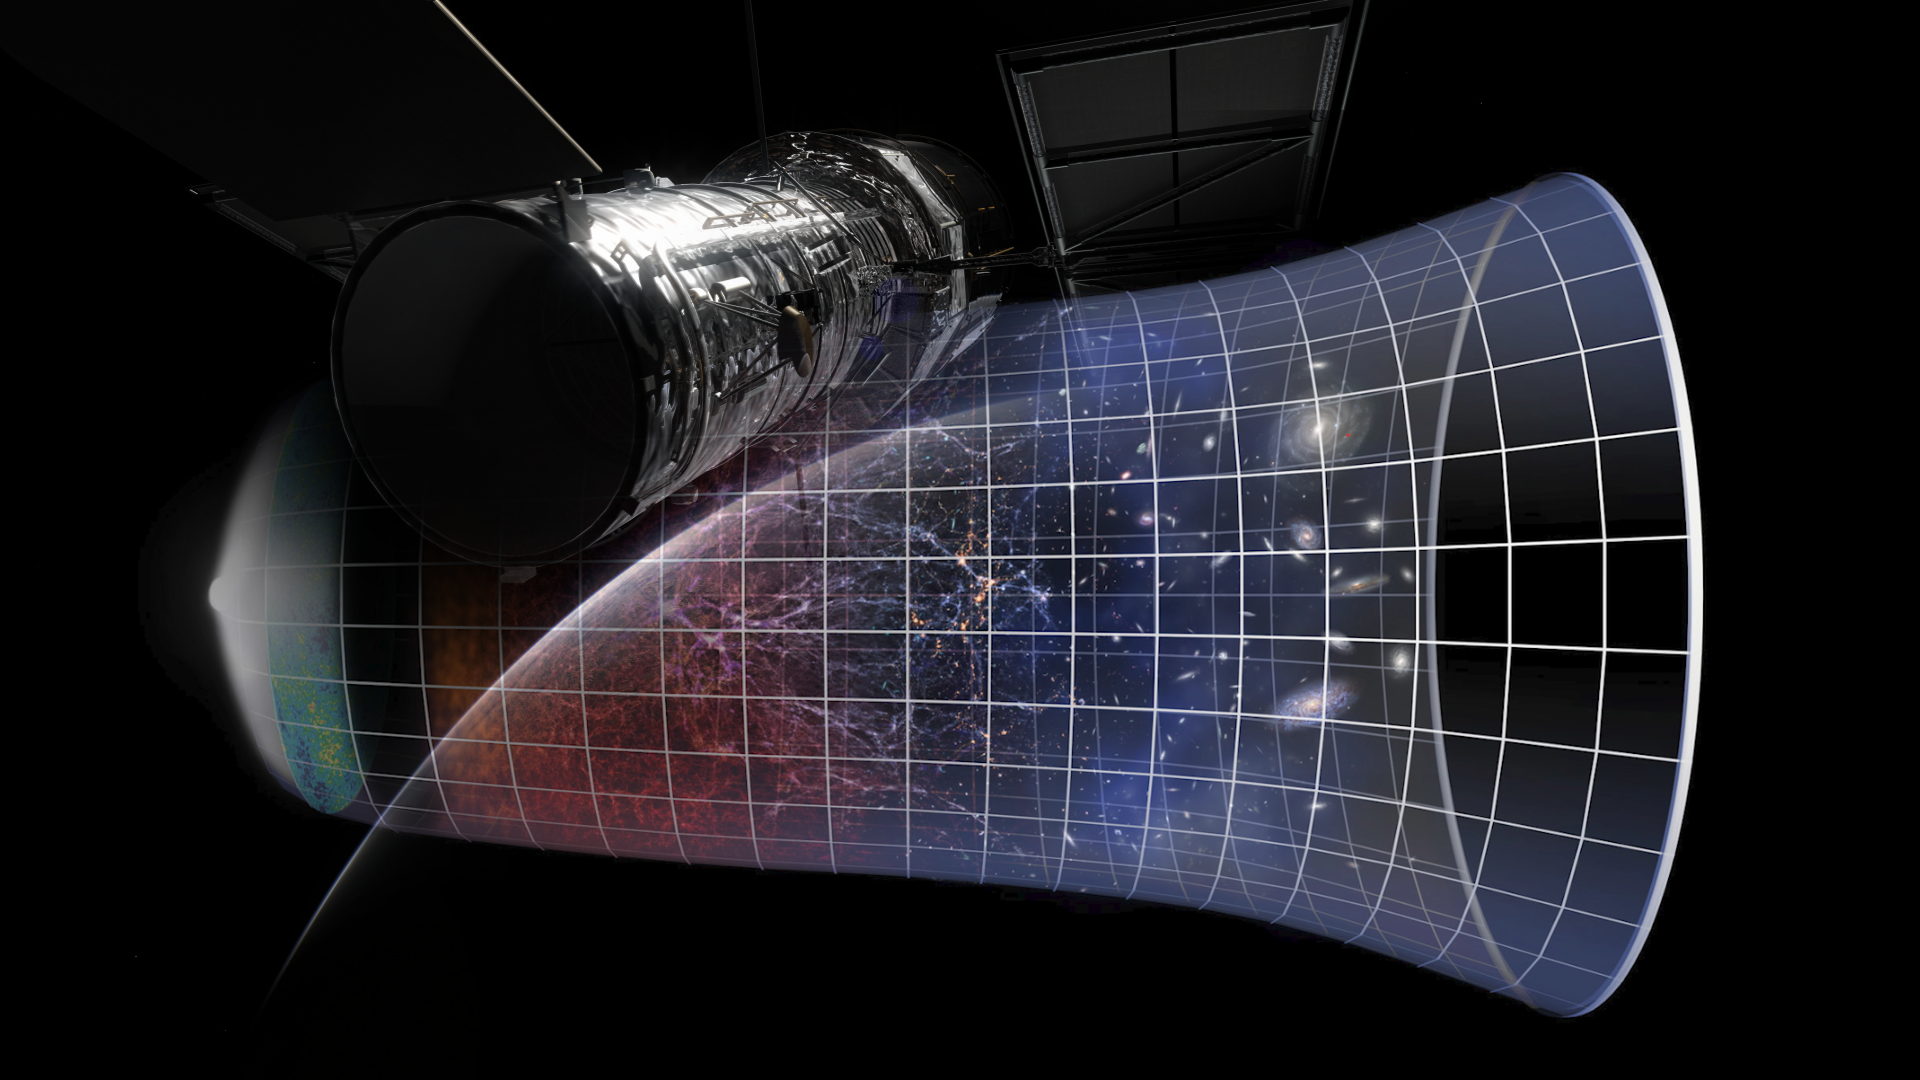

Screenshot of Hubblecast 118

Screenshot of Hubblecast 118

Credit: NASA & ESA